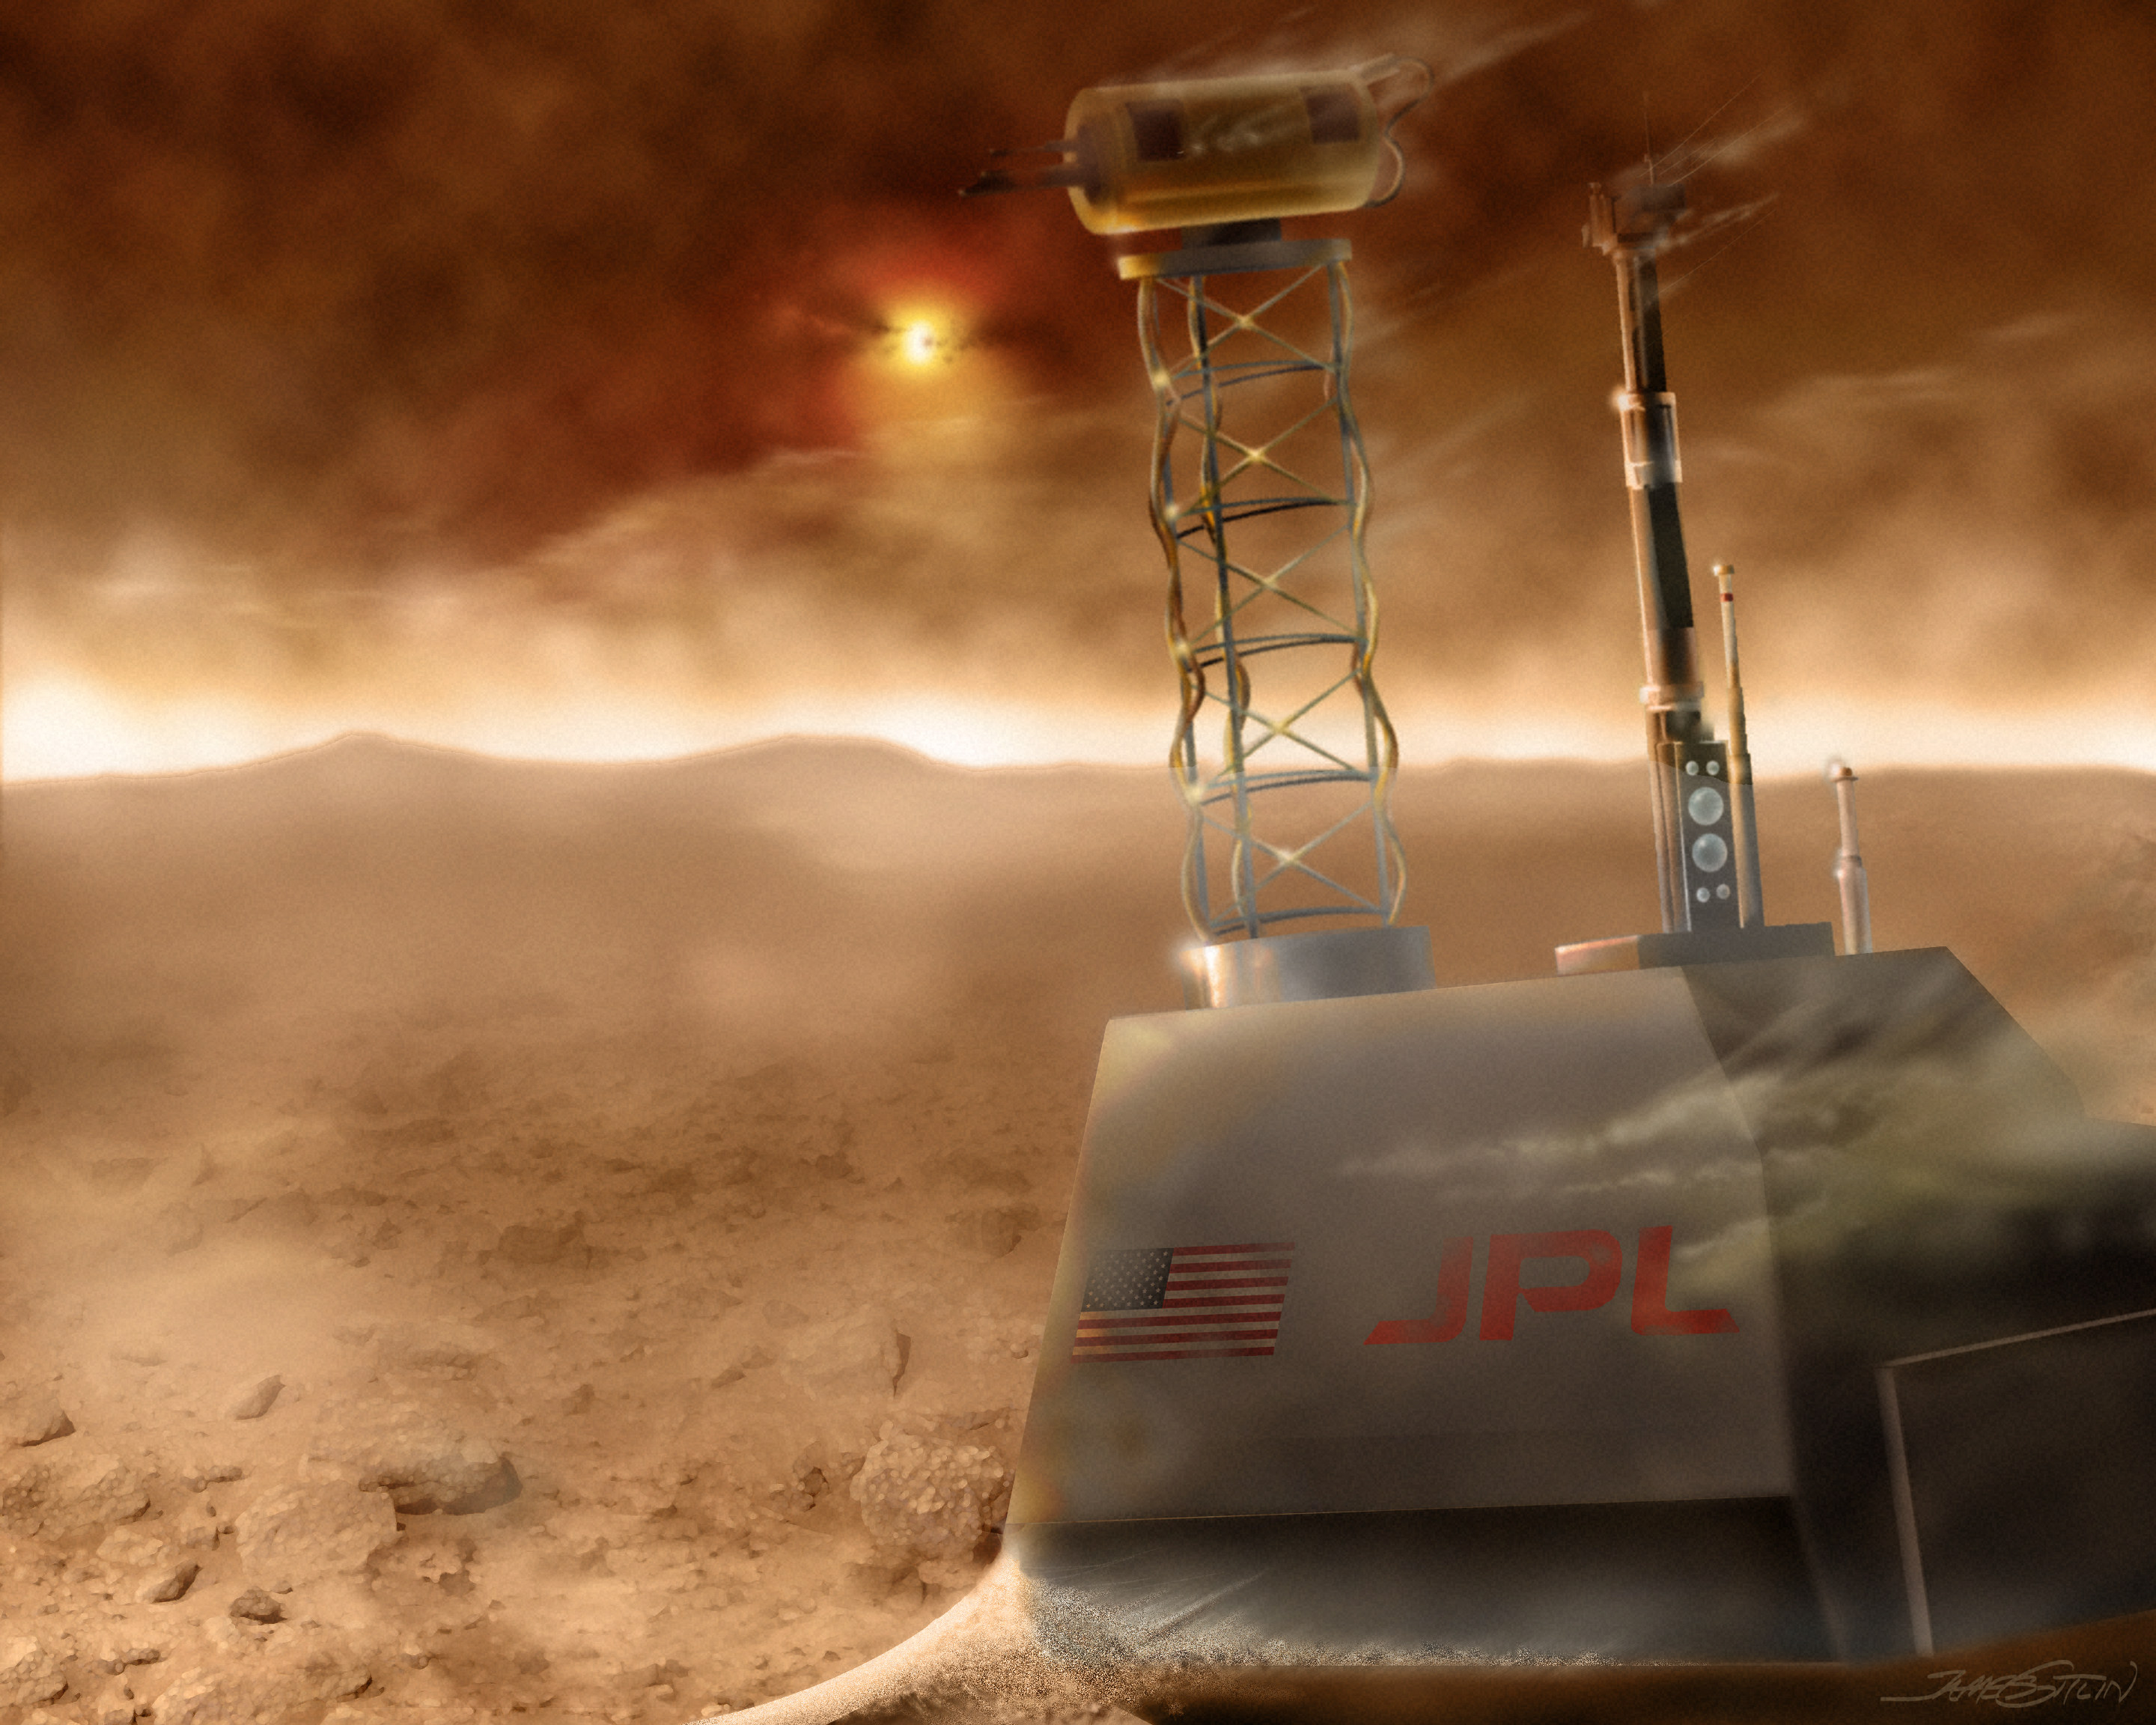

View of Martian surface before dust storm (artist's impression)

A rover takes a pounding during a Martian dust storm (artist's impression).

Credit: James Gitlin (STScI)